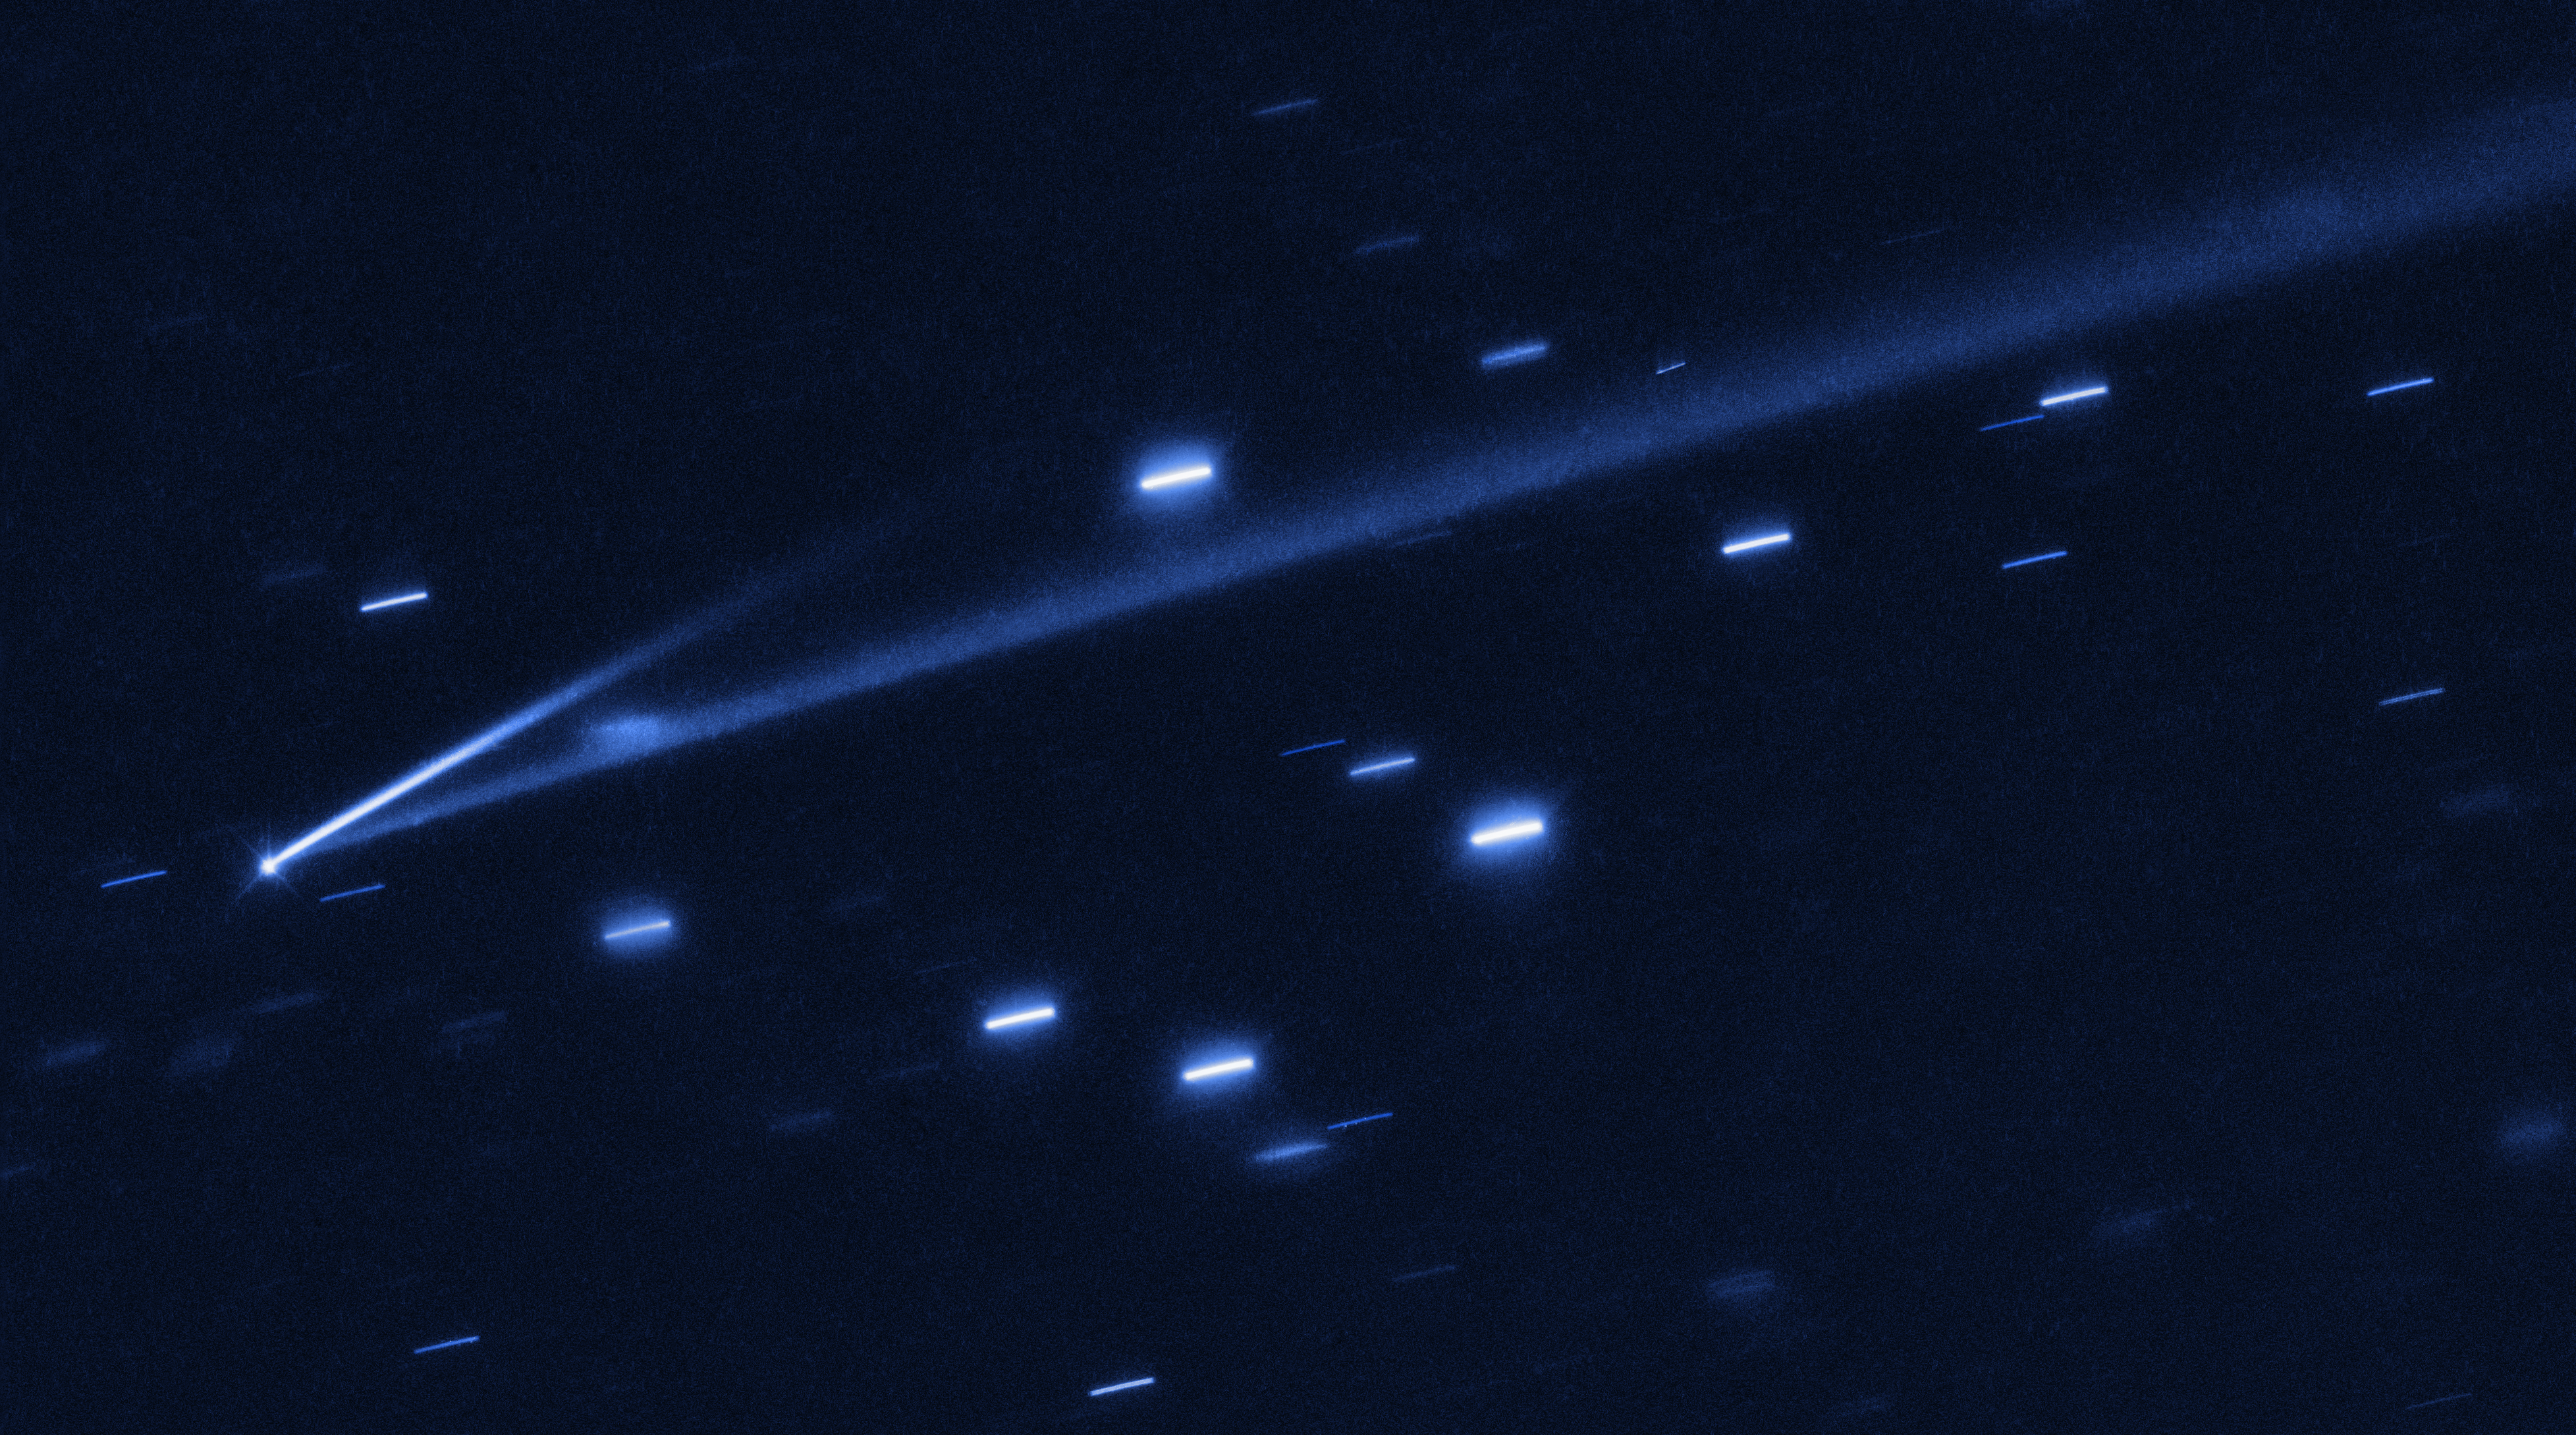

Asteroid 6478 Gault

The asteroid 6478 Gault is seen with the NASA/ESA Hubble Space Telescope, showing two narrow, comet-like tails of debris that tell us that the asteroid is slowly undergoing self-destruction. The bright streaks surrounding the asteroid are background stars. The Gault asteroid is located between the orbits of Mars and Jupiter.

Credit: NASA, ESA, K. Meech and J. Kleyna (University of Hawaii), O. Hainaut (European Southern Observatory)